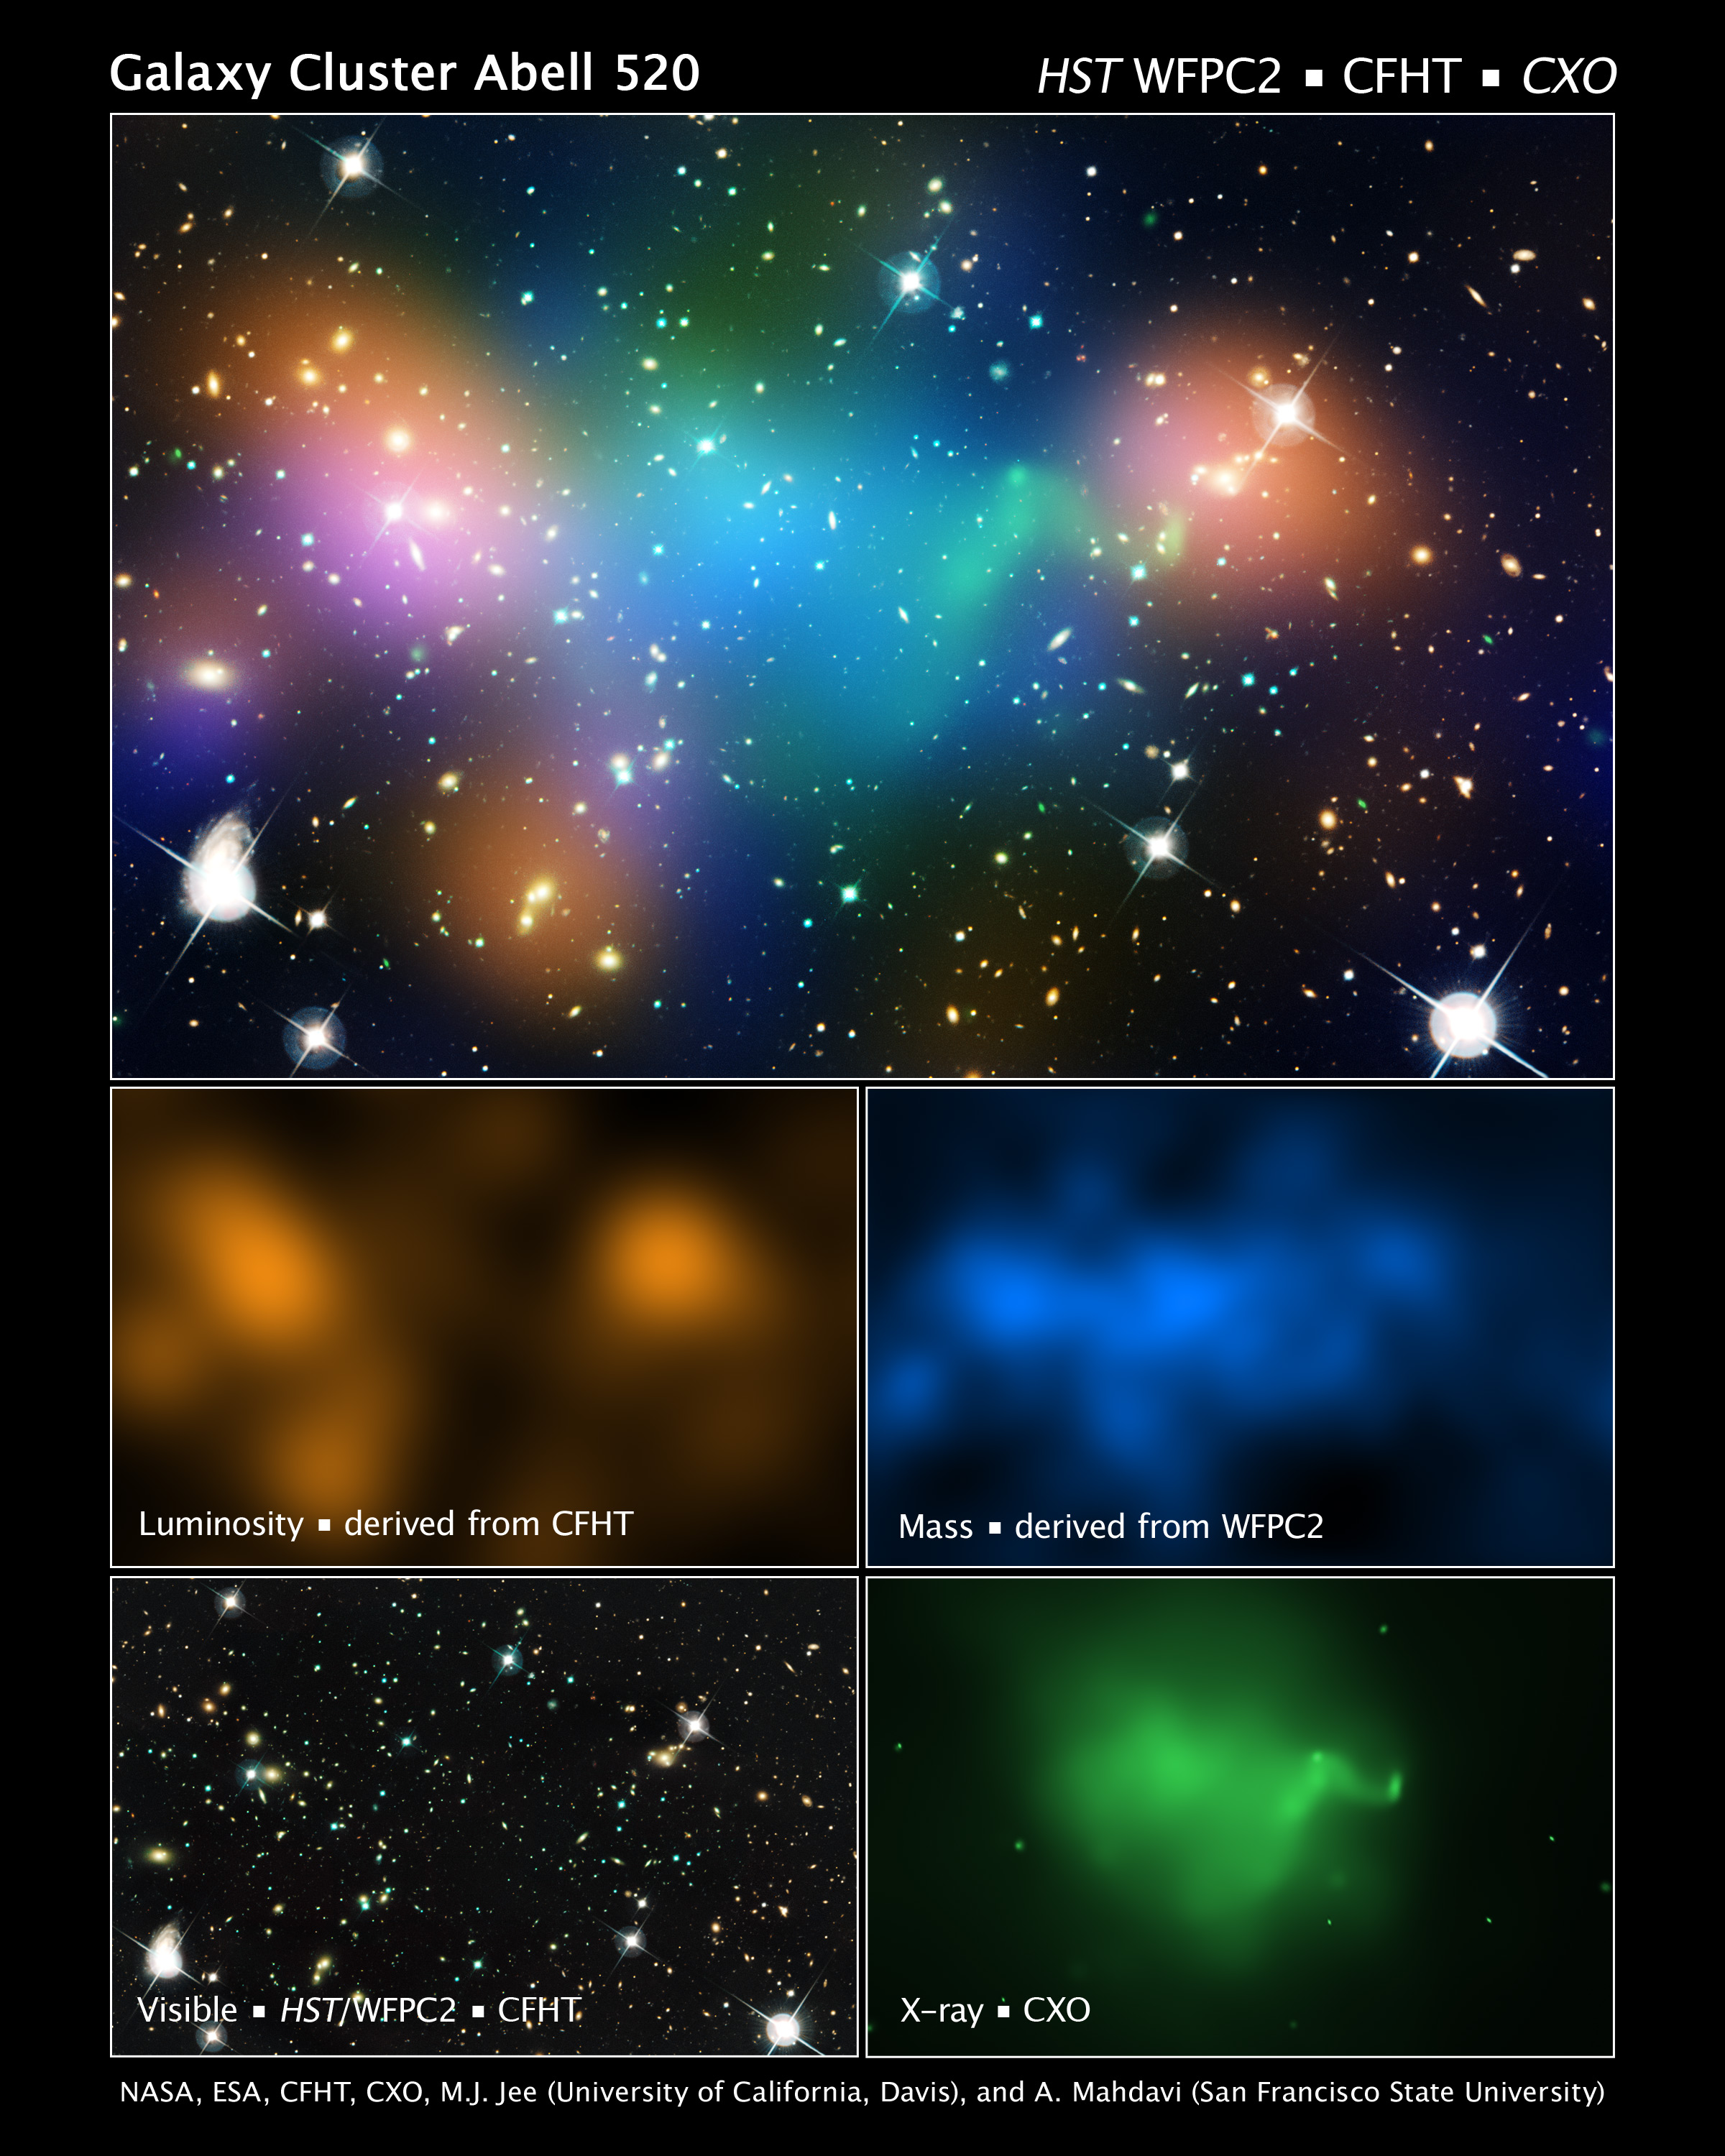

Galaxy cluster Abell 520 (plus CFHT, HST, CFHT/HST, and CXO overlays)

This composite image shows the distribution of dark matter, galaxies, and hot gas in the core of the merging galaxy cluster Abell 520, formed from a violent collision of massive galaxy clusters.

The natural-colour image of the galaxies was taken with the NASA/ESA Hubble Space Telescope and with the Canada-France-Hawaii Telescope in Hawaii. Superimposed on the image are "false-coloured" maps showing the concentration of starlight, hot gas, and dark matter. Starlight from galaxies, derived from observations by the Canada-France-Hawaii Telescope, is coloured orange. The green-tinted regions show hot gas, as detected by NASA's Chandra X-ray Observatory. The gas is evidence that a collision took place. The blue-coloured areas pinpoint the location of most of the mass in the cluster, which is dominated by dark matter. Dark matter is an invisible substance that makes up most of the Universe's mass. The dark-matter map was derived from the Hubble Wide Field Planetary Camera 2 observations by detecting how light from distant objects is distorted by the cluster of galaxies, an effect called gravitational lensing.

The blend of blue and green in the centre of the image reveals that a clump of dark matter resides near most of the hot gas, where very few galaxies are found. This finding confirms previous observations of a dark-matter core in the cluster. The result could present a challenge to basic theories of dark matter, which predict that galaxies should be anchored to dark matter, even during the shock of a collision.

Abell 520 resides 2.4 billion light-years away.

Credit: NASA, ESA, CFHT, CXO, M.J. Jee (University of California, Davis), and A. Mahdavi (San Francisco State University, California)